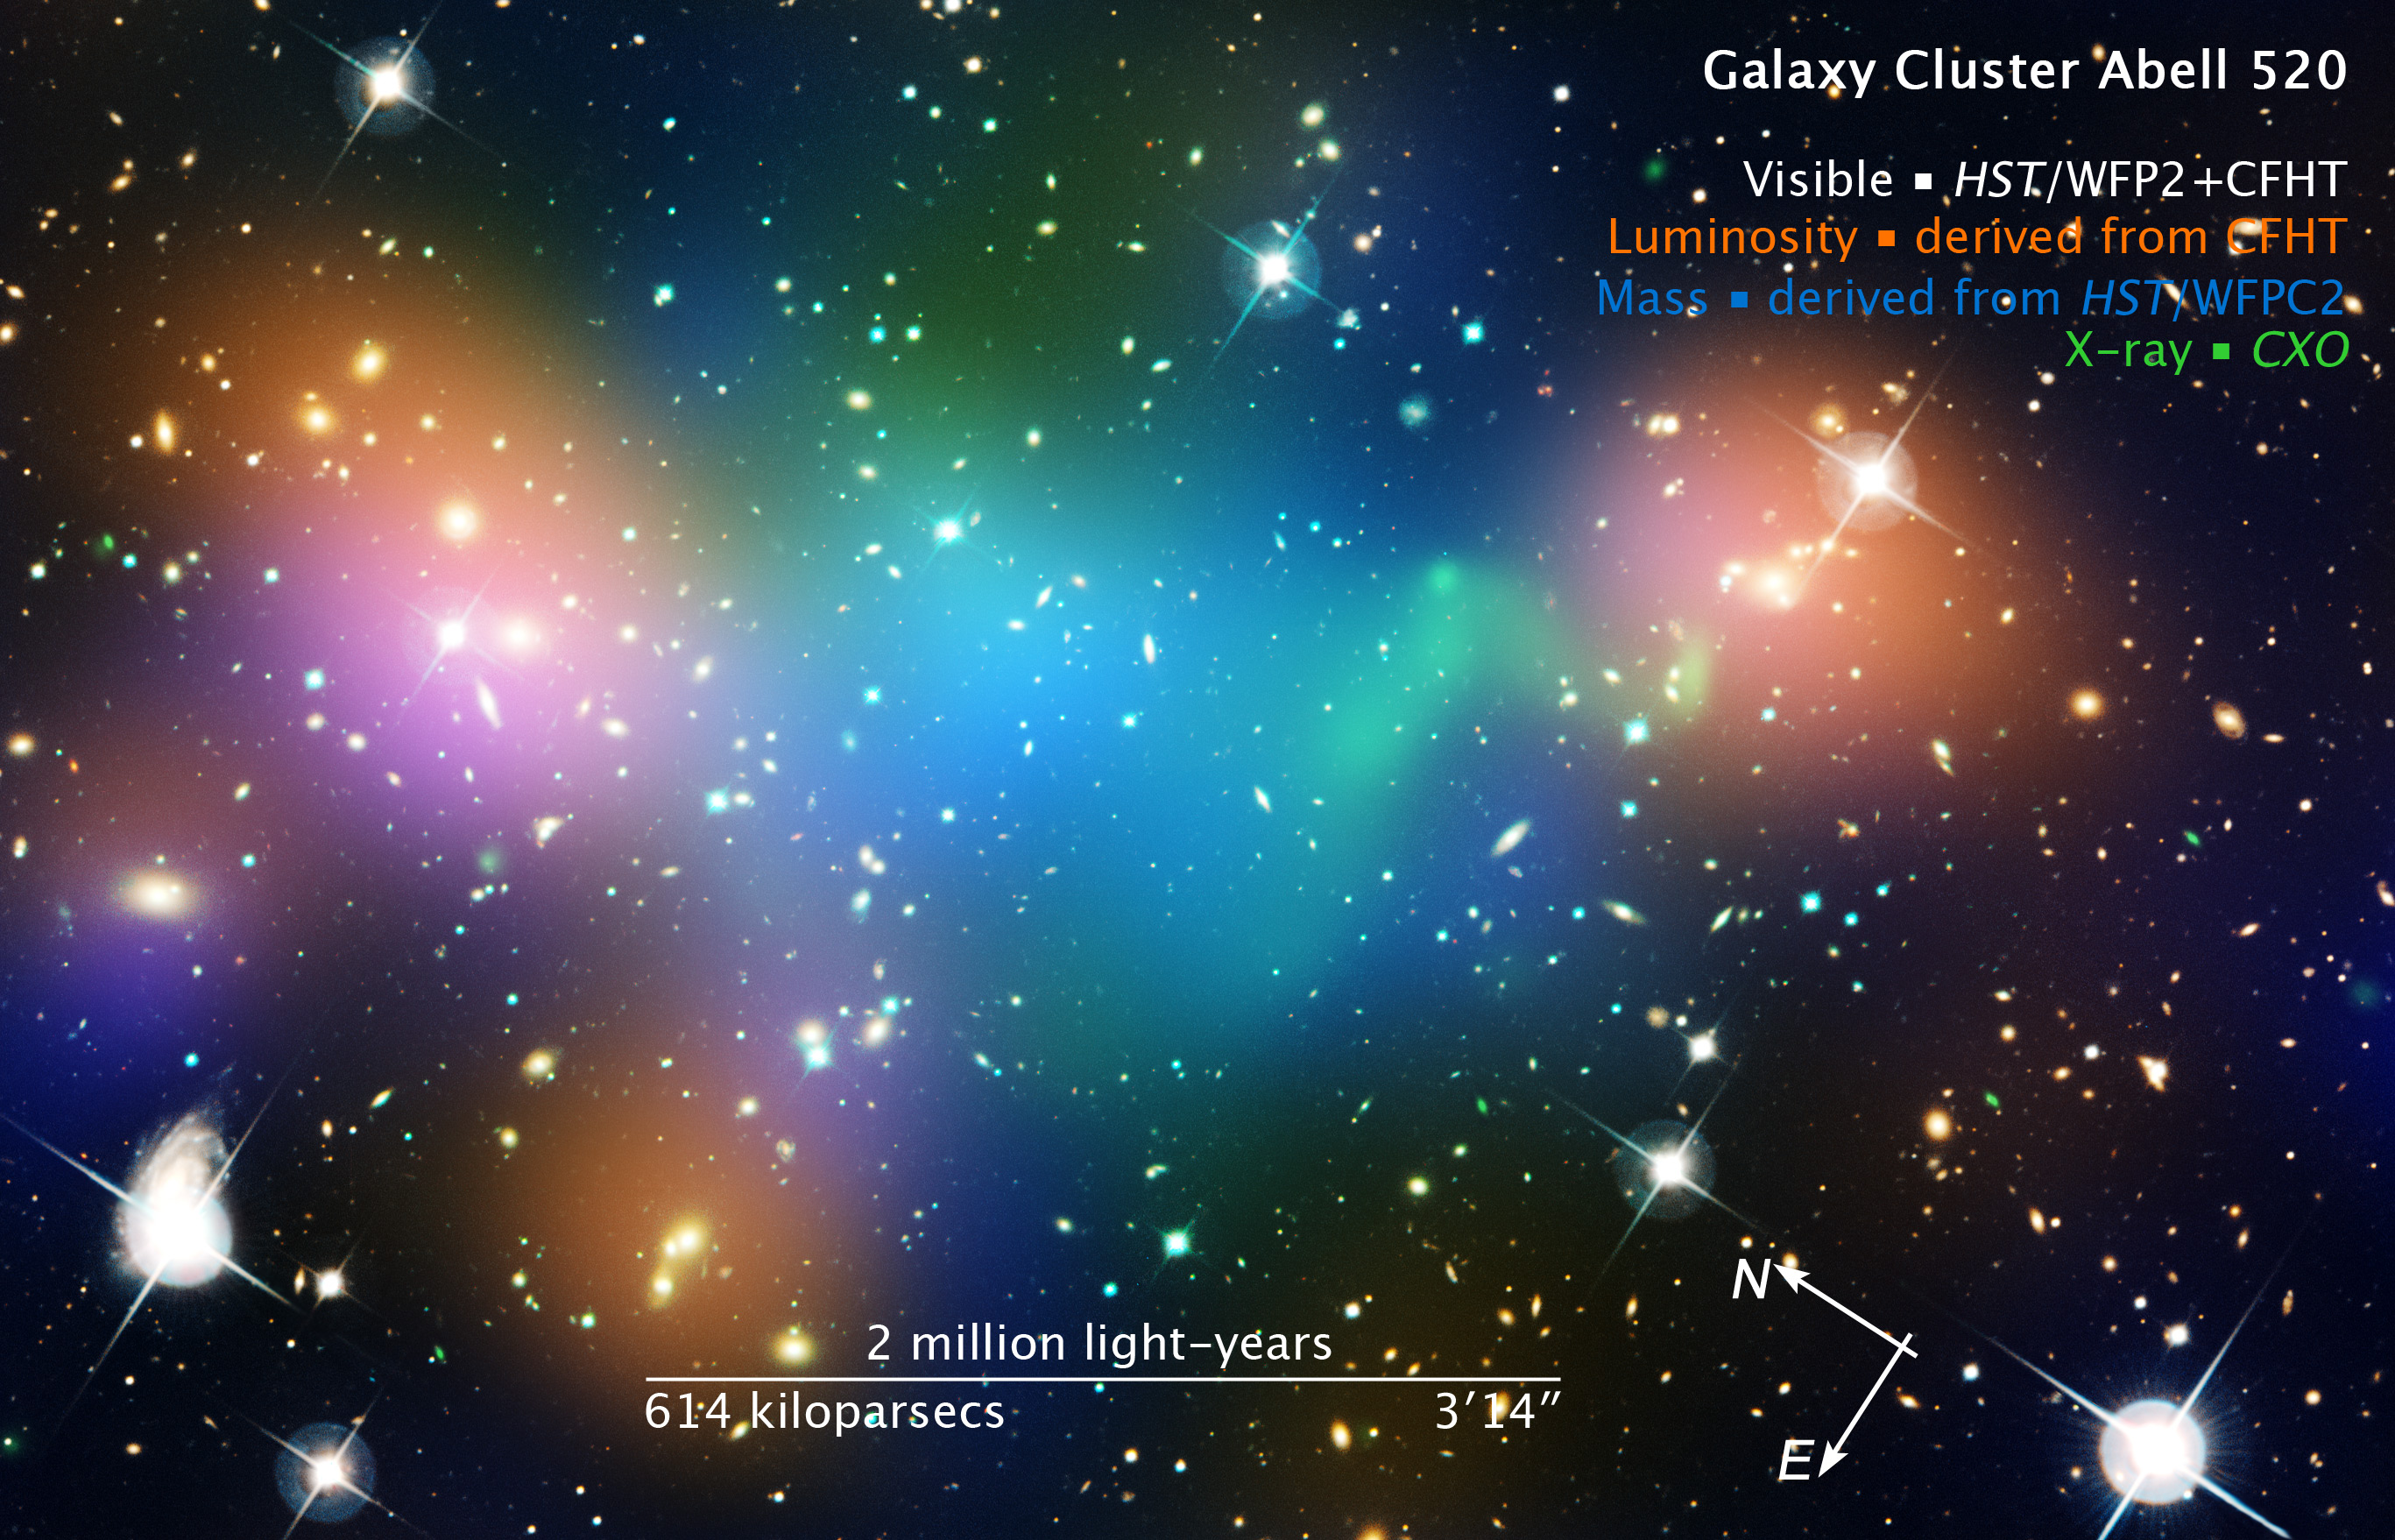

Compass and scale image of Abell 520

Compass and scale image of Abell 520.

Credit: NASA, ESA, and Z. Levay (STScI). Image Credit: NASA, ESA, CFHT, CXO, M.J. Jee (University of California, Davis), and A. Mahdavi (San Francisco State University)